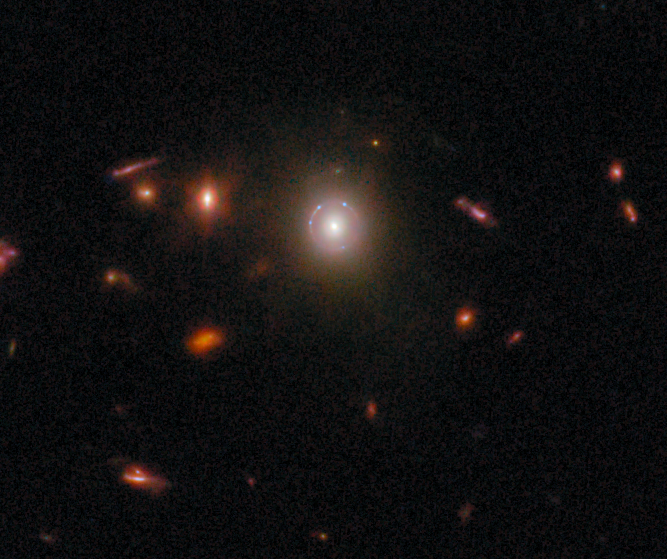

Gravitational lens COSJ095921+020638

An elliptical galaxy roughly 6 billion light-years away is bending the light from a more distant galaxy whose light has been stretched into a delicate circle. The blue points of light along the circle may be individual star clusters.

This gravitational lens is one of eight featured in the September 2025 Picture of the Month.

Credit: ESA/Webb, NASA & CSA, G. Gozaliasl, A. Koekemoer, M. Franco